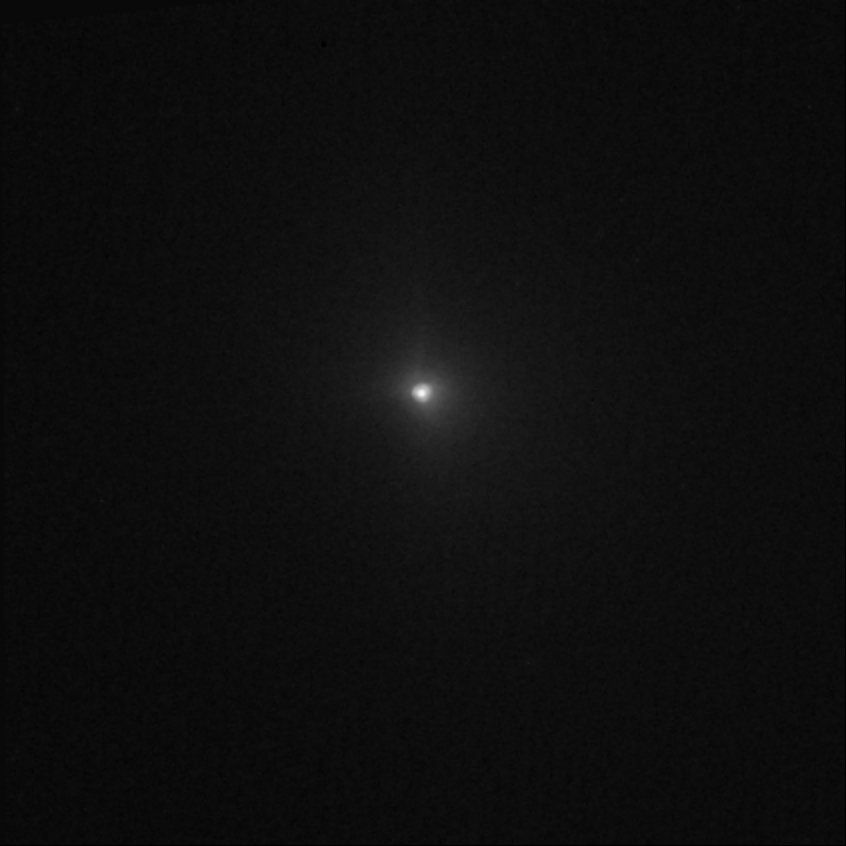

Hubble captures Deep Impact's collision with a comet (view 3 min before impact)

The image shows the comet three minutes before impact. The encounter occurred at 7:52 CEST 4 July.

Credit: NASA, ESA, P. Feldman (Johns Hopkins University), and H. Weaver (Johns Hopkins University Applied Physics Lab)